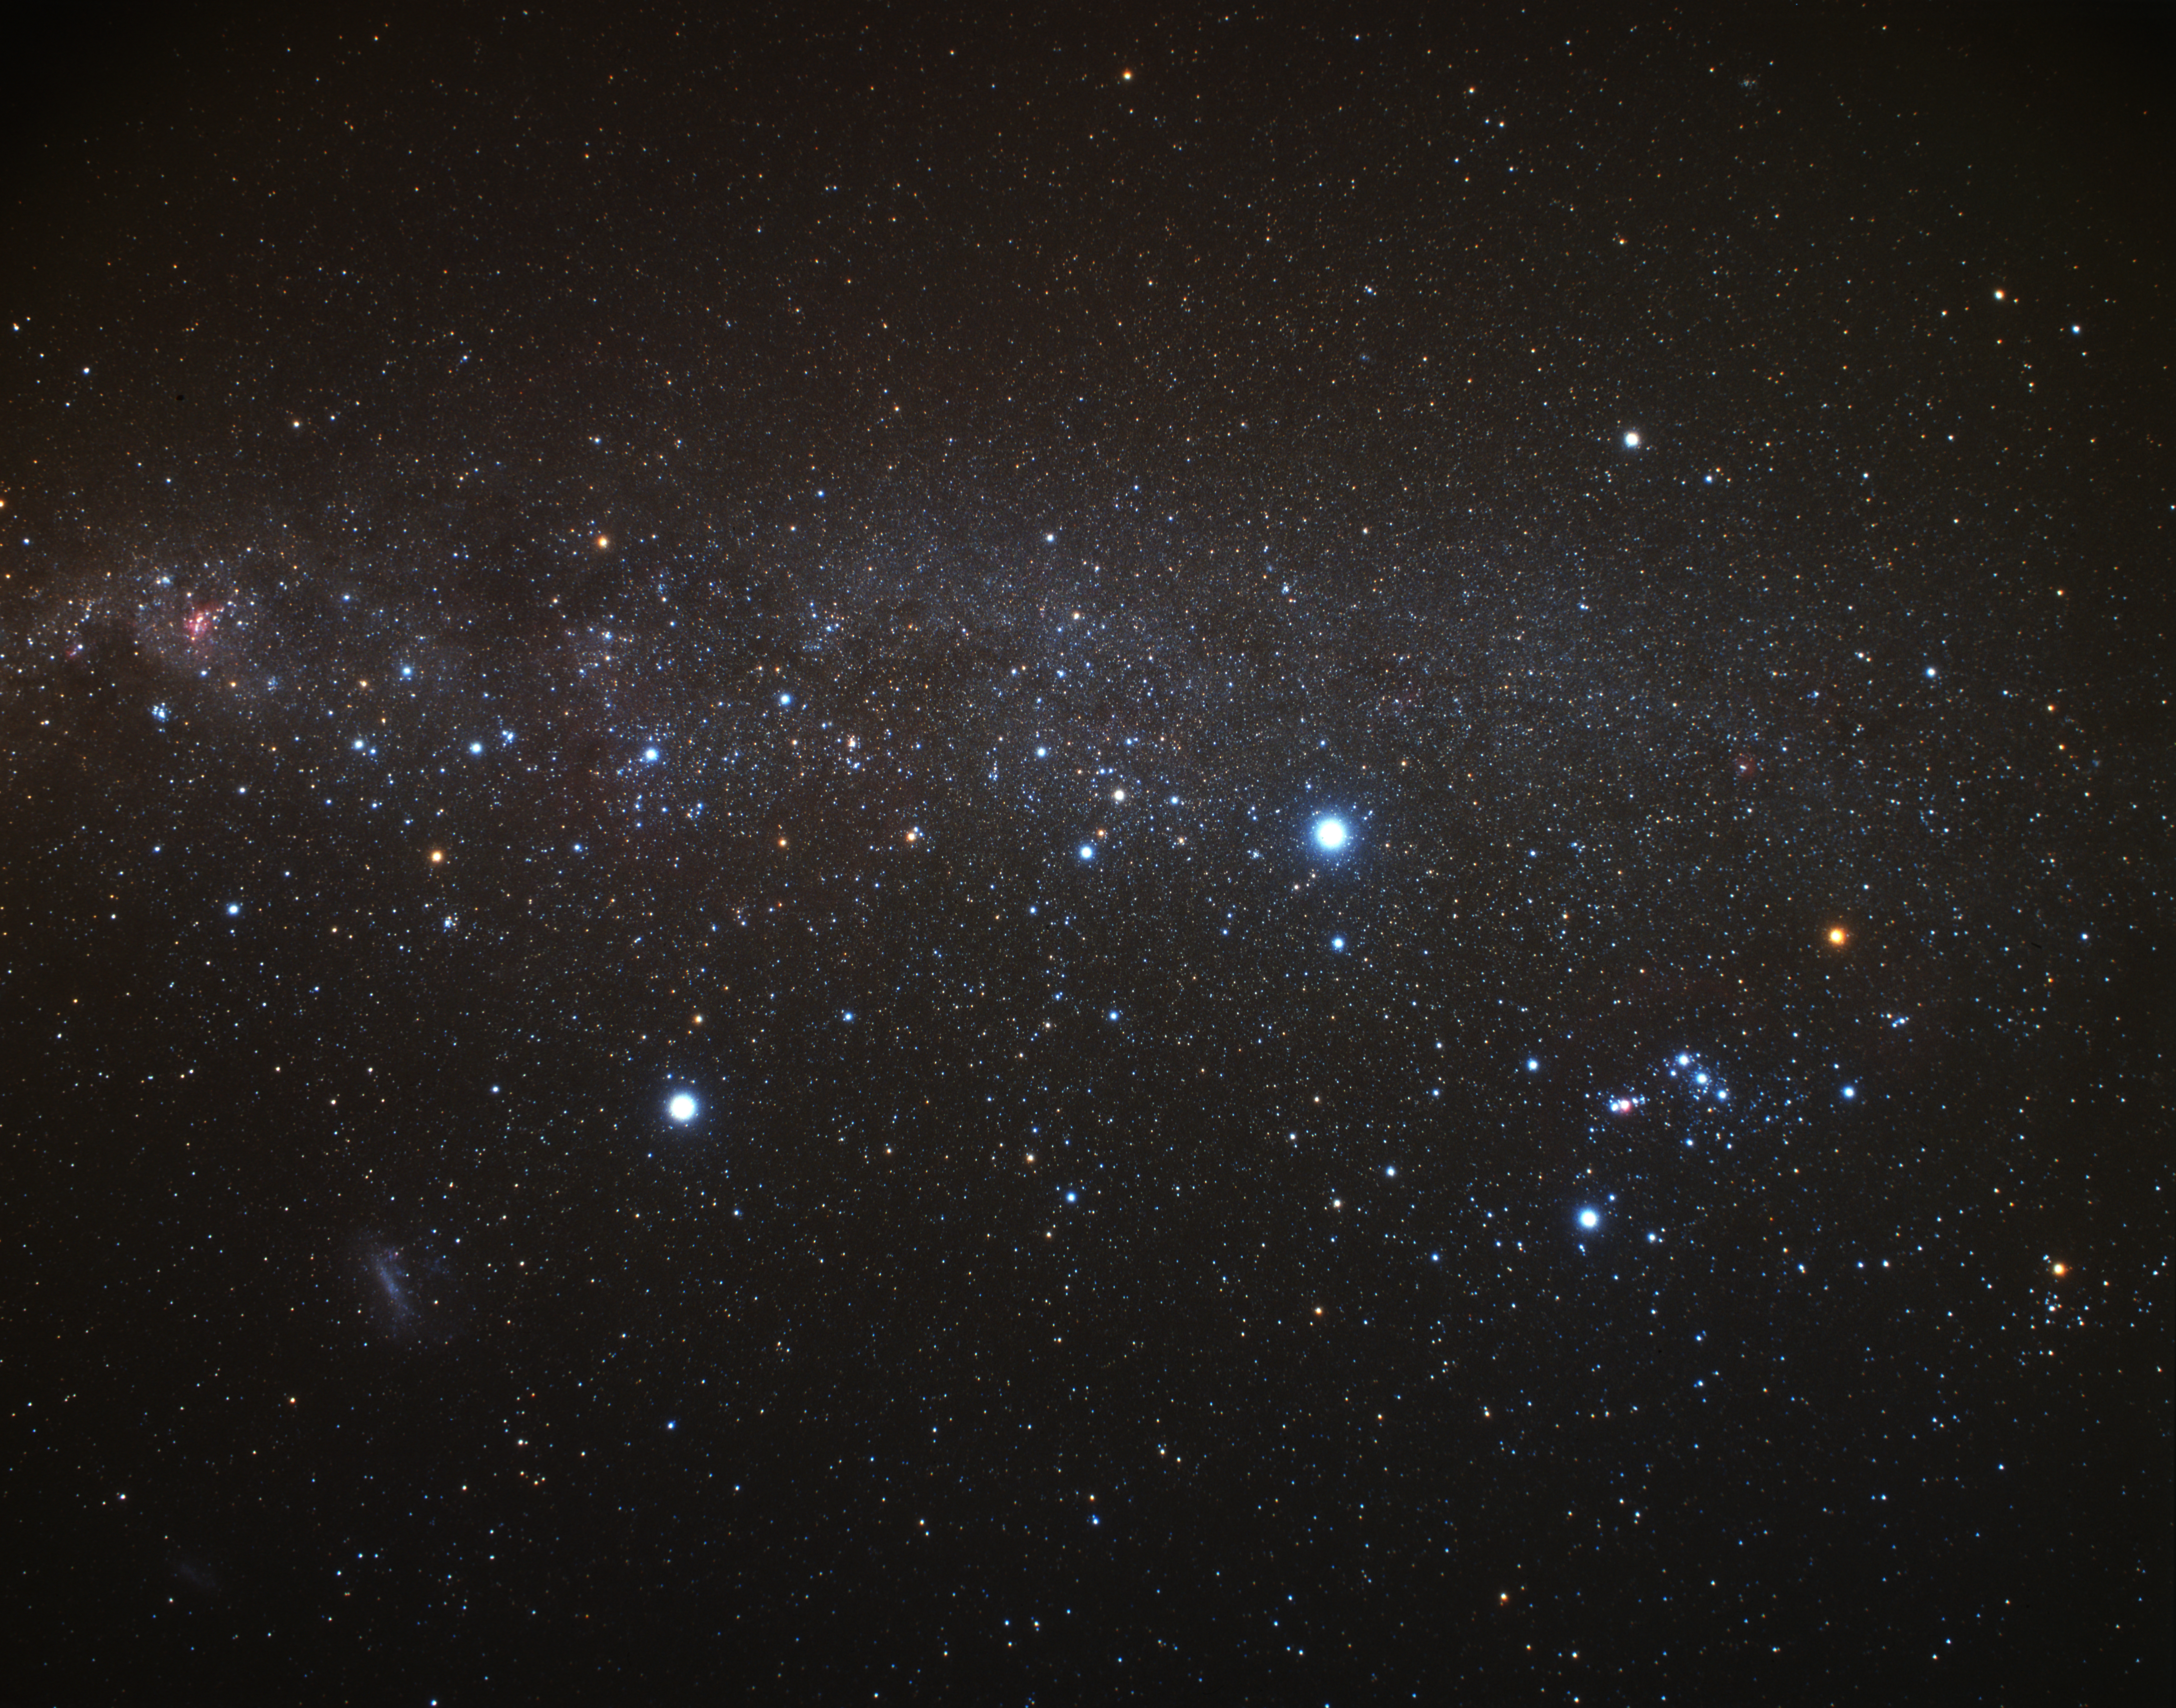

The southern Milky Way (ground-based image)

Wide-field image of the southern Milky Way. On the right is the constellation of Orion, on the left, Carina, the Keel, where NGC 2808 is located.

Credit: A. Fujii